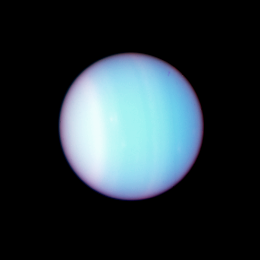

Uranus colour Composite: Full-Size Image

Astronomers think there may be small, undetected moons orbiting close to Uranus. The structure of Uranus's system of 10 rings suggests that more than the 13 known inner moons are needed to keep the rings in place.

Credit: NASA/ESA, M. Showalter (Stanford University/NASA/ESA Ames Research Center), J. Lissauer (NASA/ESA Ames Research Center)